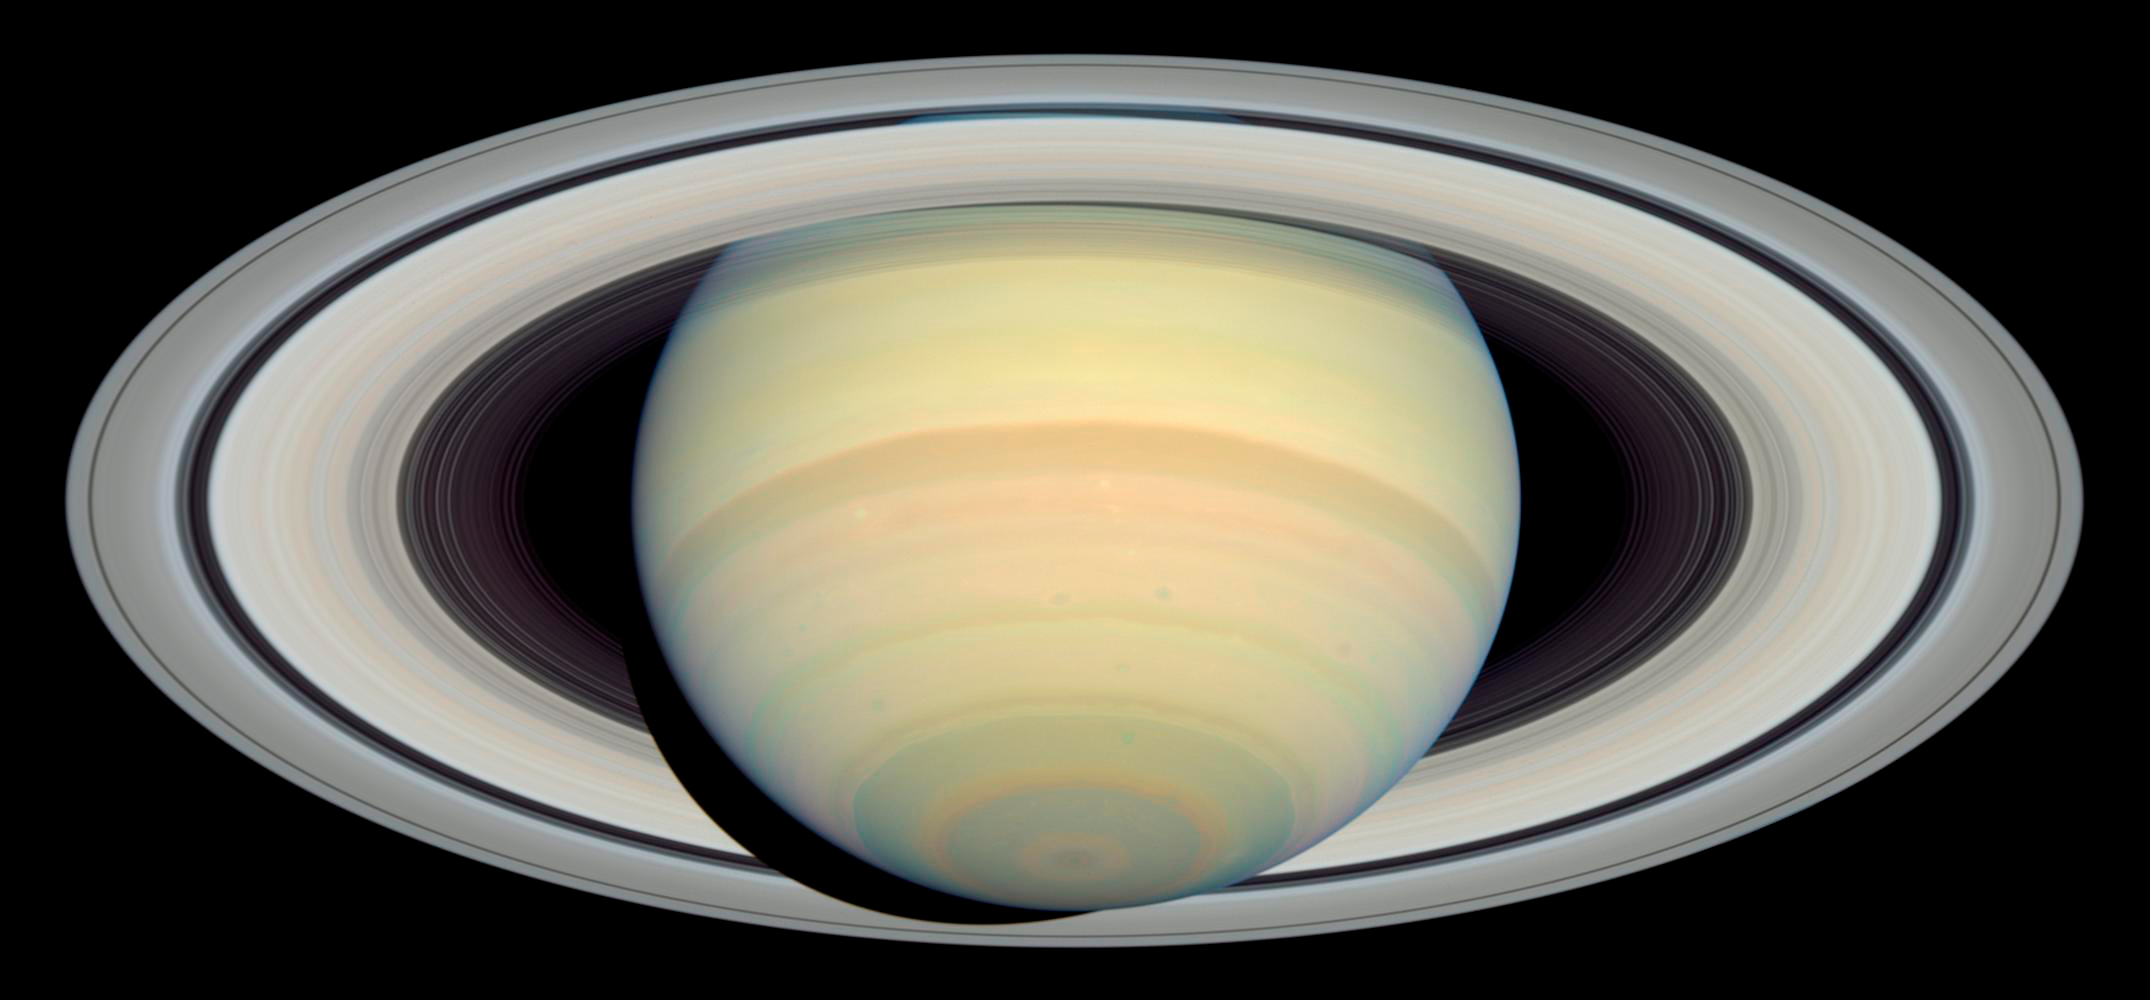

Saturn as Seen by Hubble

Hubble's global views of Saturn compliment Cassini's close up views very nicely.

Credit: NASA, ESA and E. Karkoschka (University of Arizona)